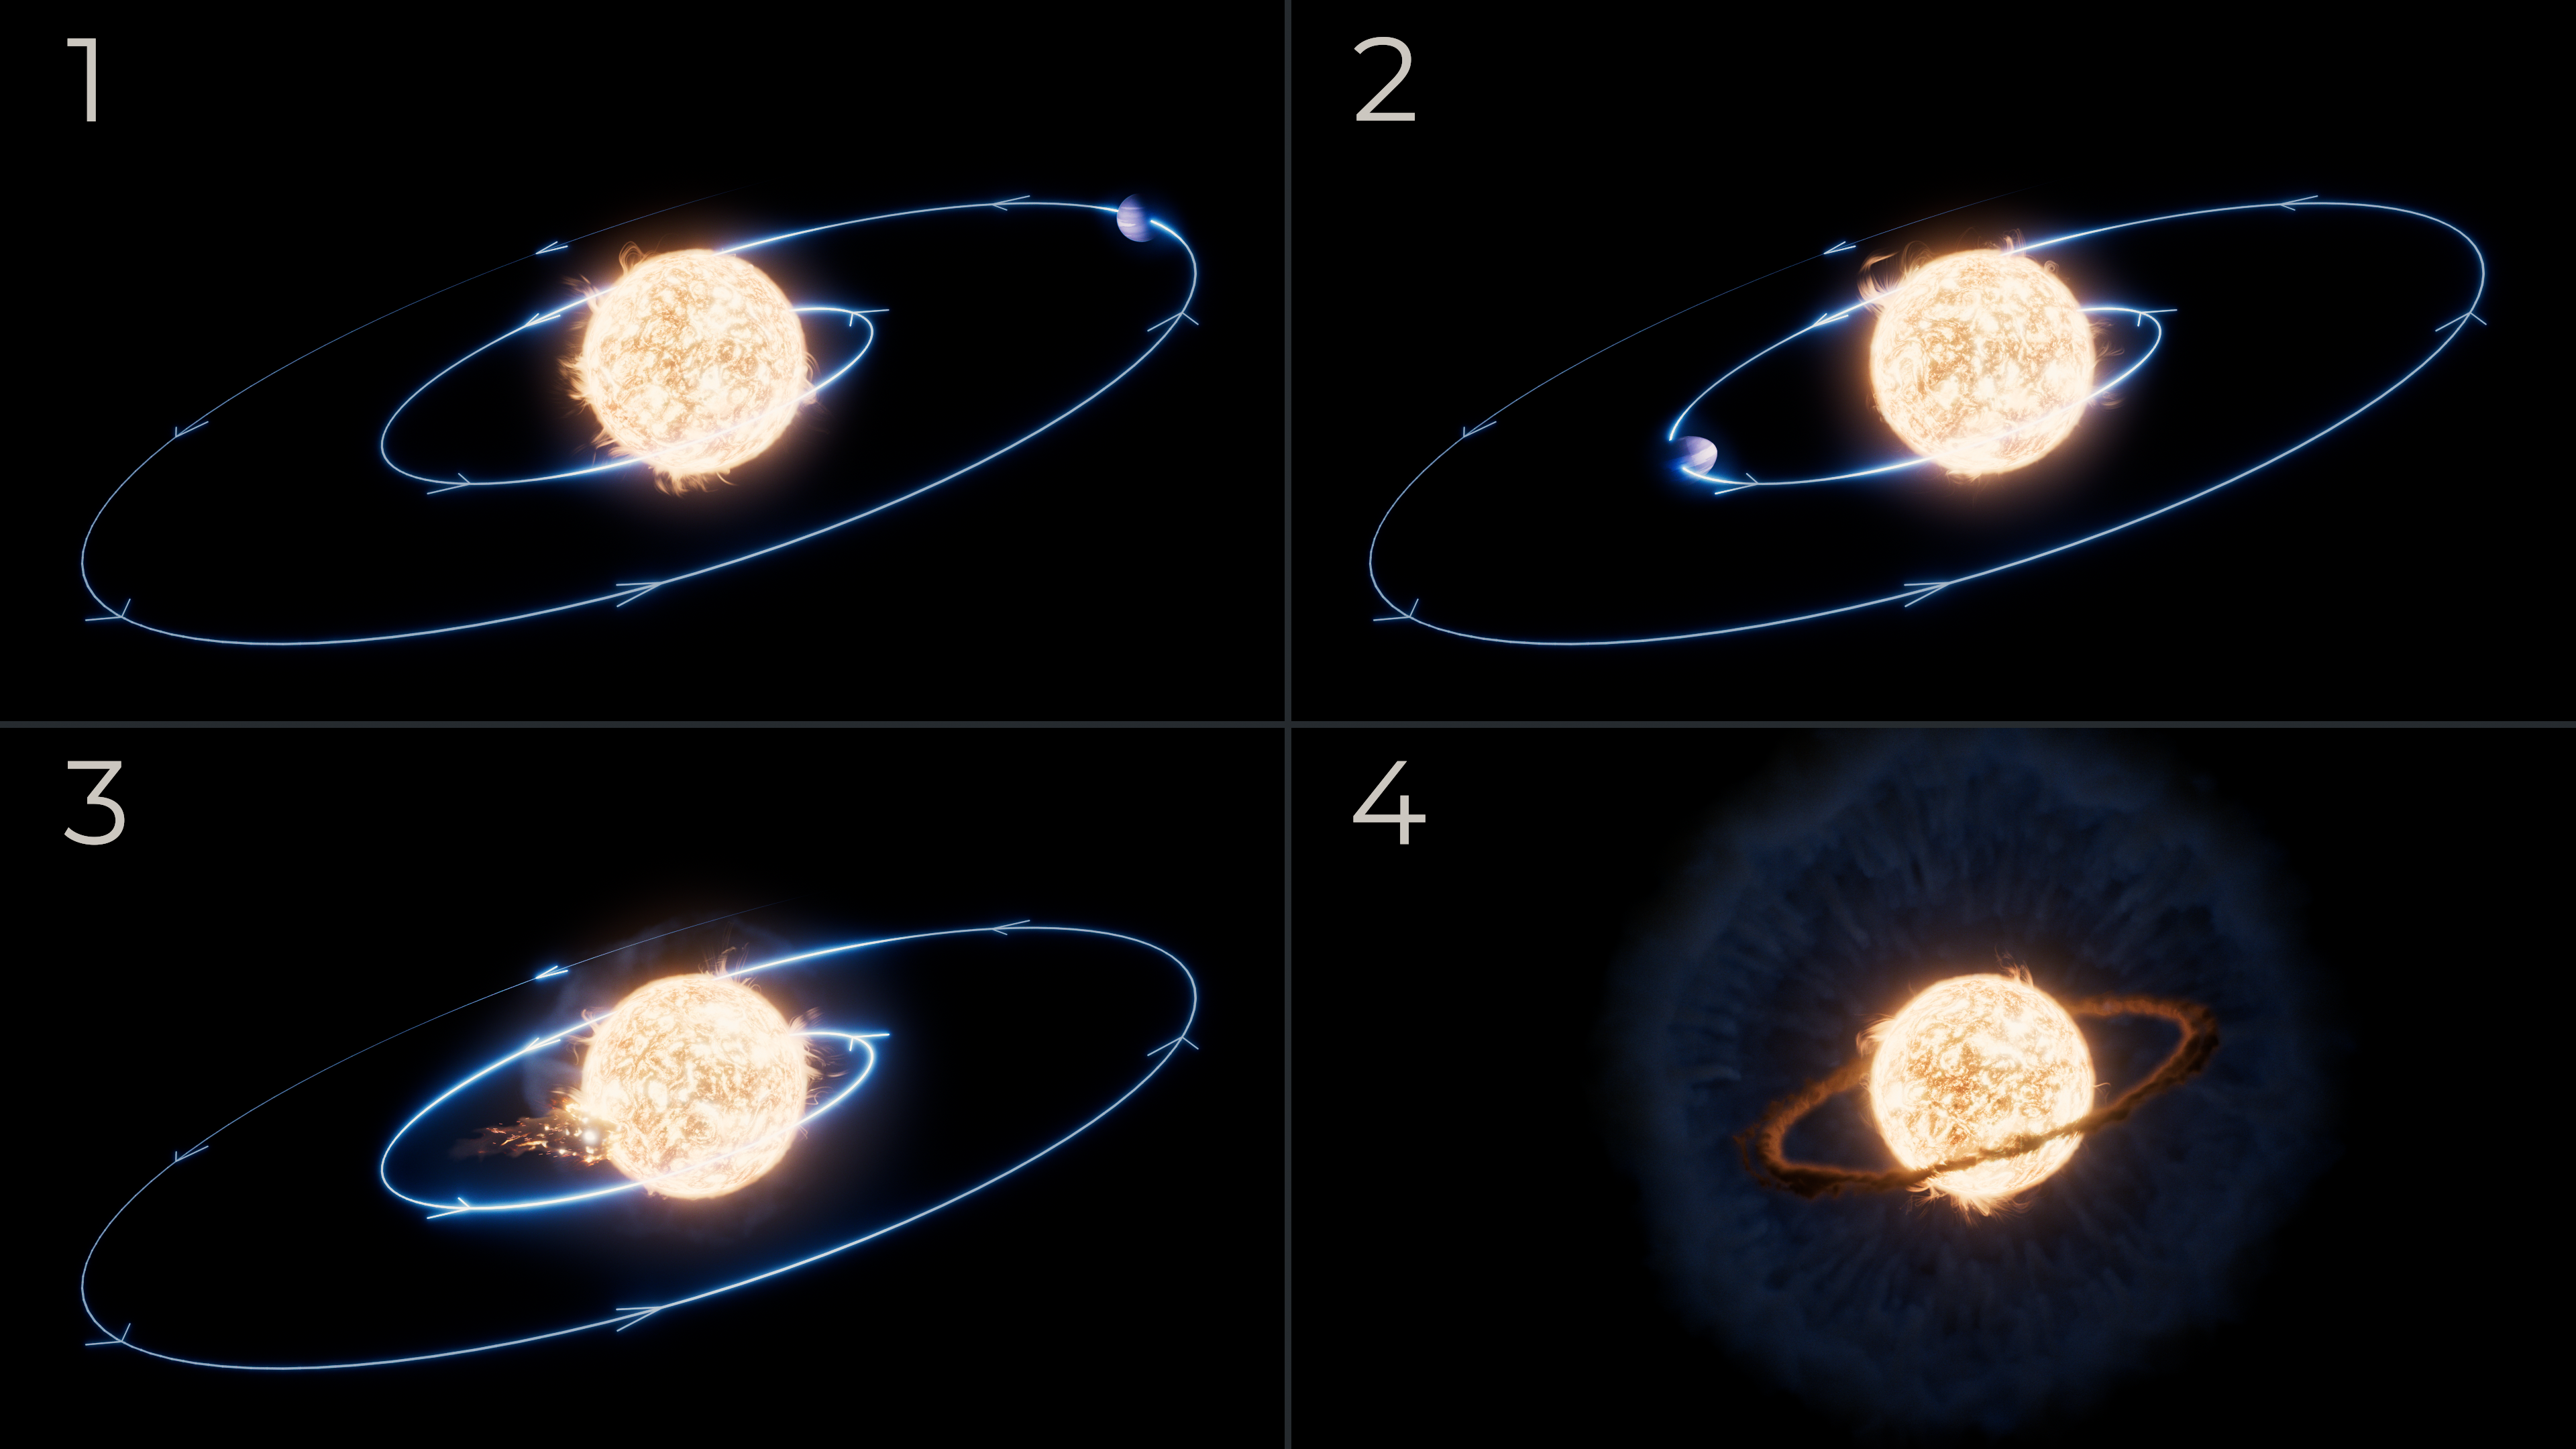

Planetary engulfment illustration

The NASA/ESA/CSA James Webb Space Telescope’s observations of what is thought to be the first ever recorded planetary engulfment event revealed a hot accretion disk surrounding the star, with an expanding cloud of cooler dust enveloping the scene. Webb also revealed that the star did not swell to swallow the planet, but the planet’s orbit actually slowly decayed over time. The star is located in the Milky Way galaxy about 12,000 light-years away from Earth.

This illustration depicts the sequence of events that took place over millions of years, based on observations from Webb’s MIRI (Mid-Infrared Instrument) and NIRSpec (NIR-Infrared Spectrograph).

Panel 1: The planet was about Jupiter-sized, and orbited very close to the star – even closer that Mercury’s orbit around our Sun.

Panel 2: The planet’s orbit slowly shrank, or decayed, over time, and the planet approached the star. It eventually started to graze the star’s atmosphere. As the planet was falling in, it smeared around the star.

Panel 3: The planet was engulfed by the star completely, and blasted gas away from the outer layers of the star.

Panel 4: As that gas expanded and cooled off, the heavy elements in this gas condensed into cold dust over the next year. There is a hot circumstellar disk of molecular gas closer to the star.

These findings appear today in The Astrophysical Journal.

Credit: NASA, ESA, CSA, R. Crawford (STScI)